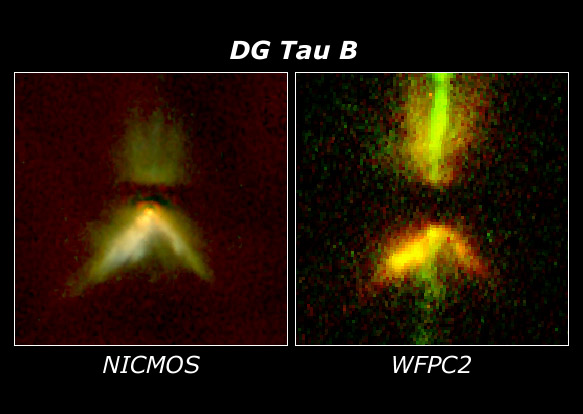

DG Tau B

An excellent example of the complementary nature of Hubble's instruments may be found by comparing the infrared NICMOS image of DG Tau B to the visible-light Wide Field and Planetary Camera 2 (WFPC2) image of the same object. WFPC2 highlights the jet emerging from the system, while NICMOS penetrates some of the dust near the star to more clearly outline the 50 billion-mile-long dust lane (the horizontal dark band, which indicates the presence of a large disk forming around the infant star). The young star itself appears as the bright red spot at the corner of the V-shaped nebula.

Credit: D. Padgett (IPAC/Caltech), W. Brandner (IPAC), K. Stapelfeldt (JPL)